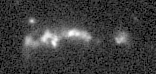

Galaxies: snapshots in time

Single images from the Galaxies: Snapshots in Time collage.

Credit: NASA & ESA